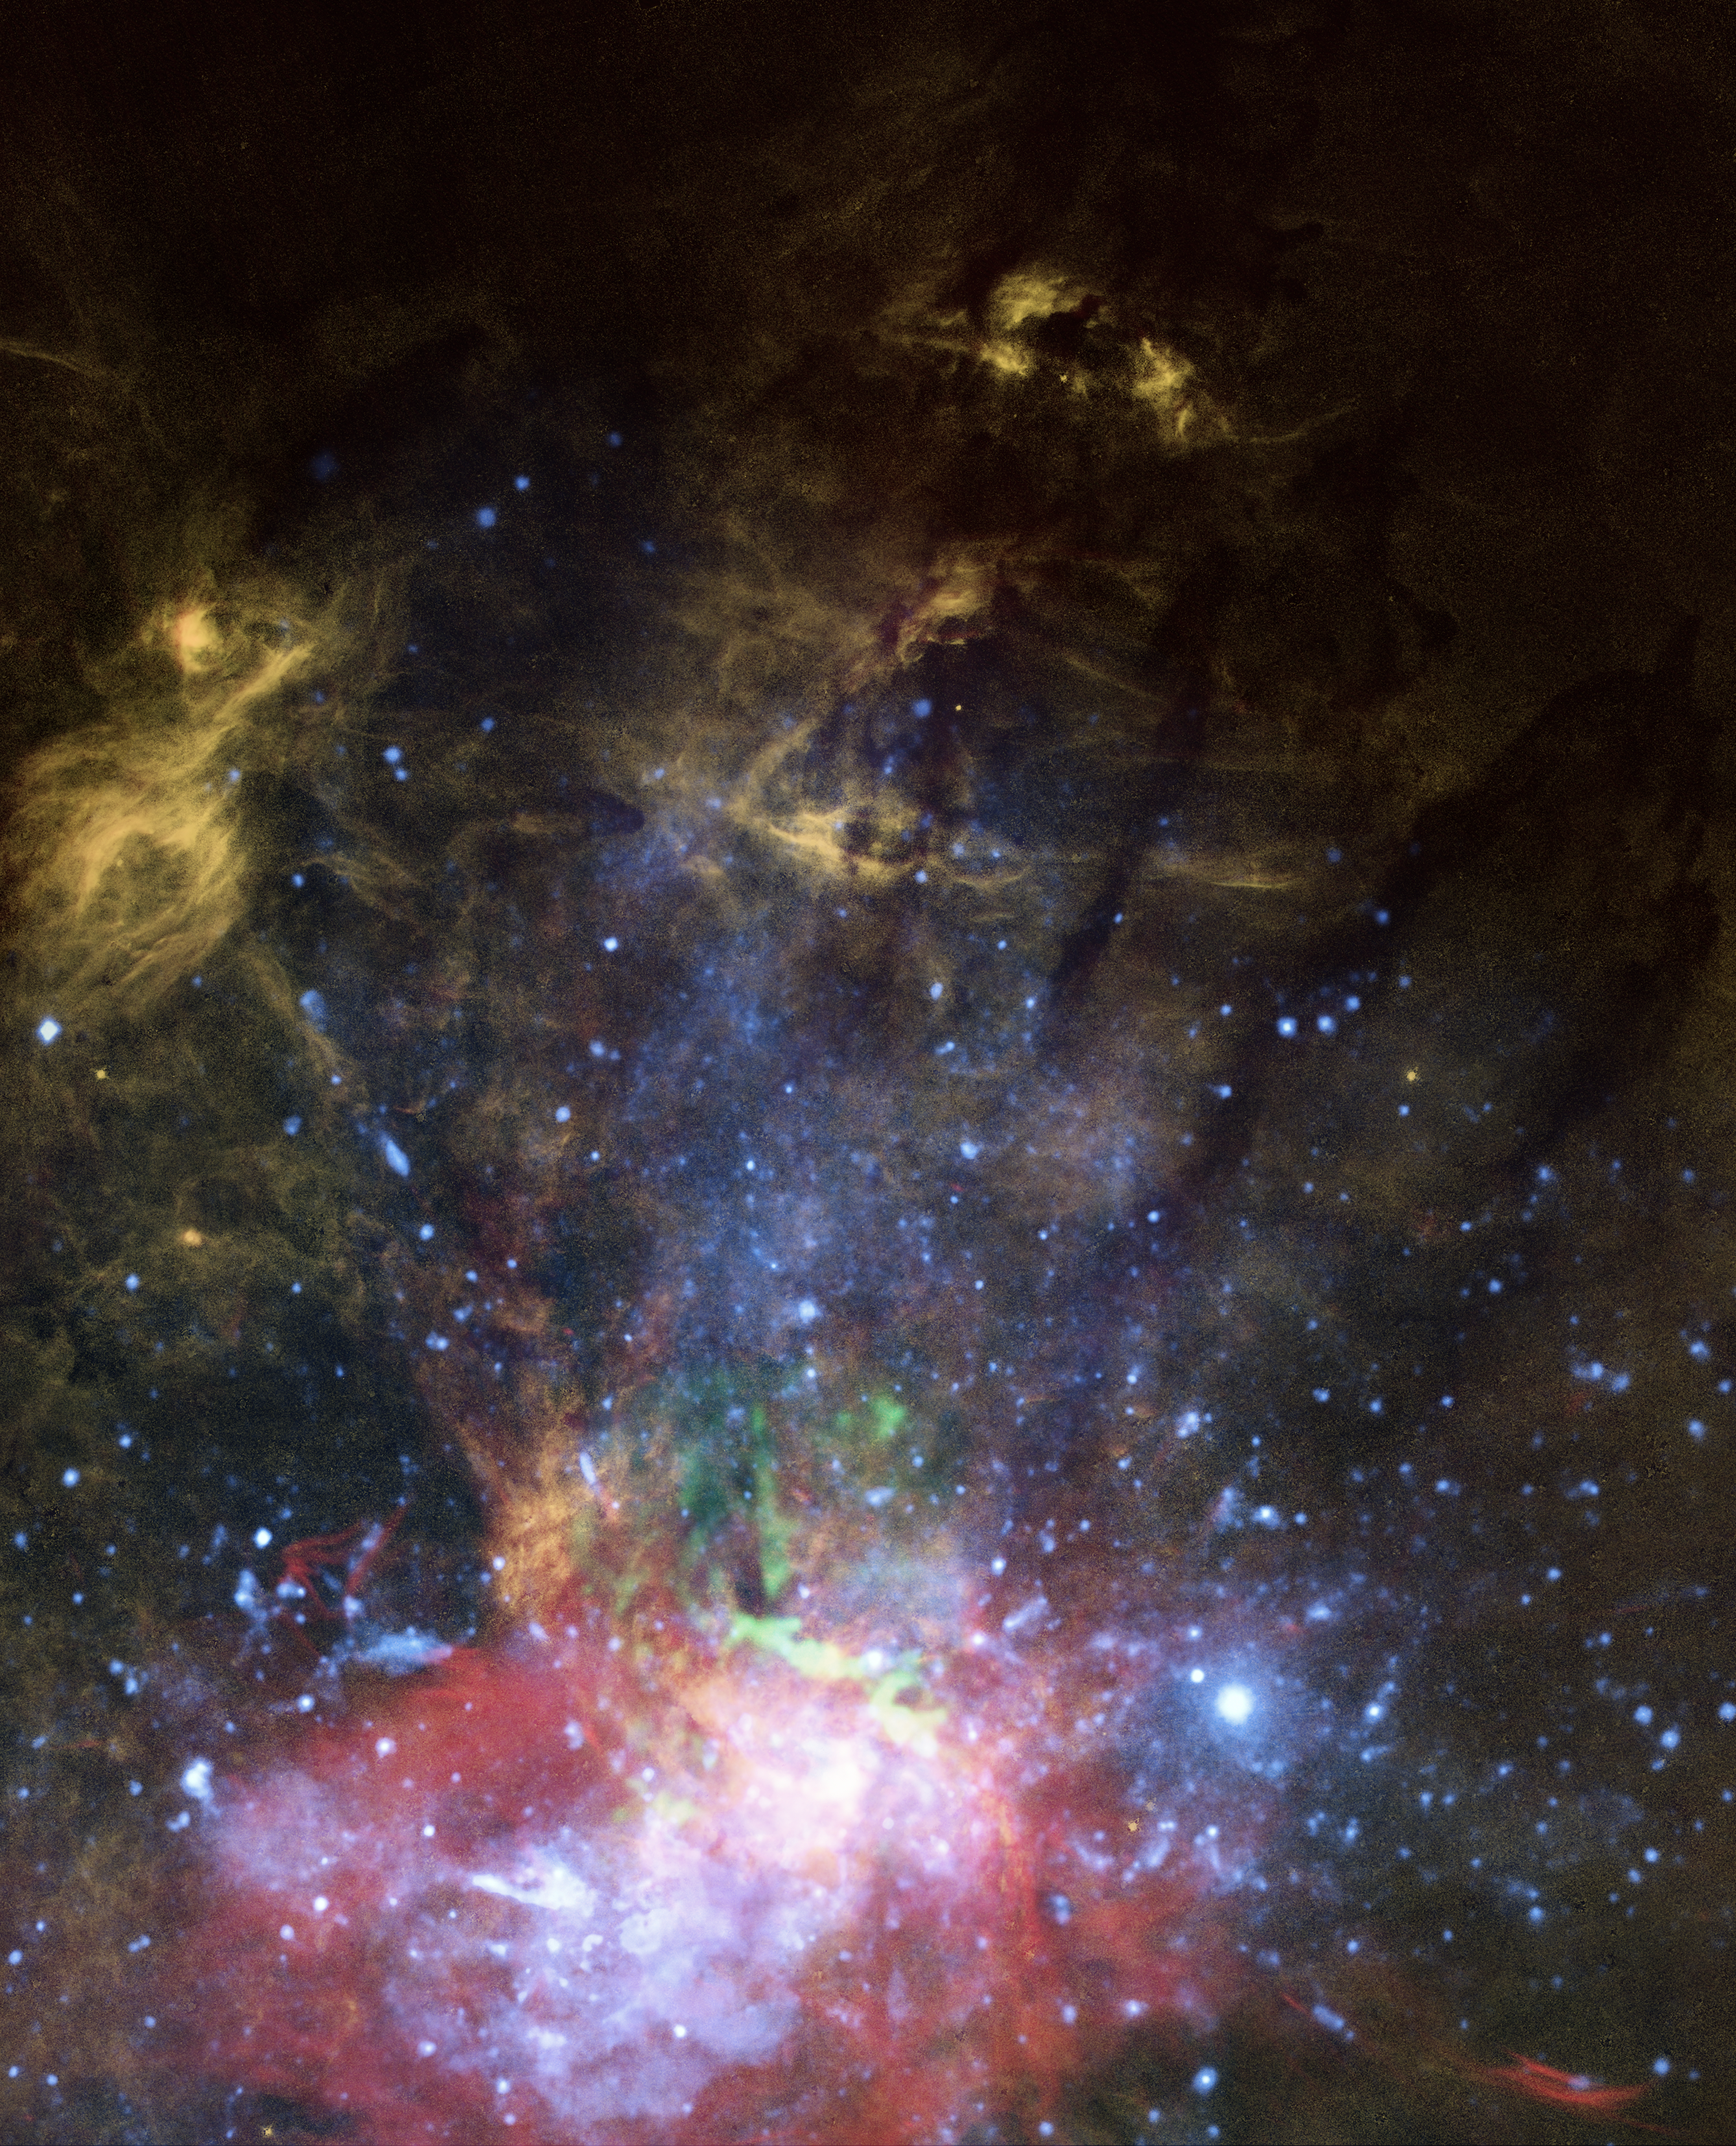

Mini-Jet Found Near Milky Way’s Supermassive Black Hole

Hubble has found circumstantial evidence that the black hole is still smoldering long after the earlier outburst. Hubble astronomers' evidence is like doing an archeological dig to try and peer through the interstellar pollution of dense sheets of dust and gas between Earth and the galactic center, 27,000 light-years away. Hubble photographed a bright knot of gas that has been impacted by an invisible jet from the black hole, that is merely 15 light-years from it. The black hole must have shown brilliantly billions of years ago as a quasar (quasi-stellar object), when our young galaxy was feeding on lots of infalling gas. But after all this time the black hole still goes through fits and starts, and is not ready for napping as long as there is a snack around.

This image presents a composite view of X-rays, molecular gas, and warm ionized gas near the galactic center. The graphic of a translucent, vertical white fan is added to show the suggested axis of a mini-jet from the supermassive black hole at the galaxy’s heart. The orange-colored features are of glowing hydrogen gas. One such feature, at the top tip of the jet is interpreted as a hydrogen cloud that has been hit by the outflowing jet. The jet scatters off the cloud into tendrils that flow northward. Farther down near the black hole are X-ray observations of superheated gas colored blue and molecular gas in green. These data are evidence that the black hole occasionally accretes stars or gas clouds, and ejects some of the superheated material along its spin axis.

Credit: NASA, ESA, Gerald Cecil (UNC-Chapel Hill), J. DePasquale (STScI)